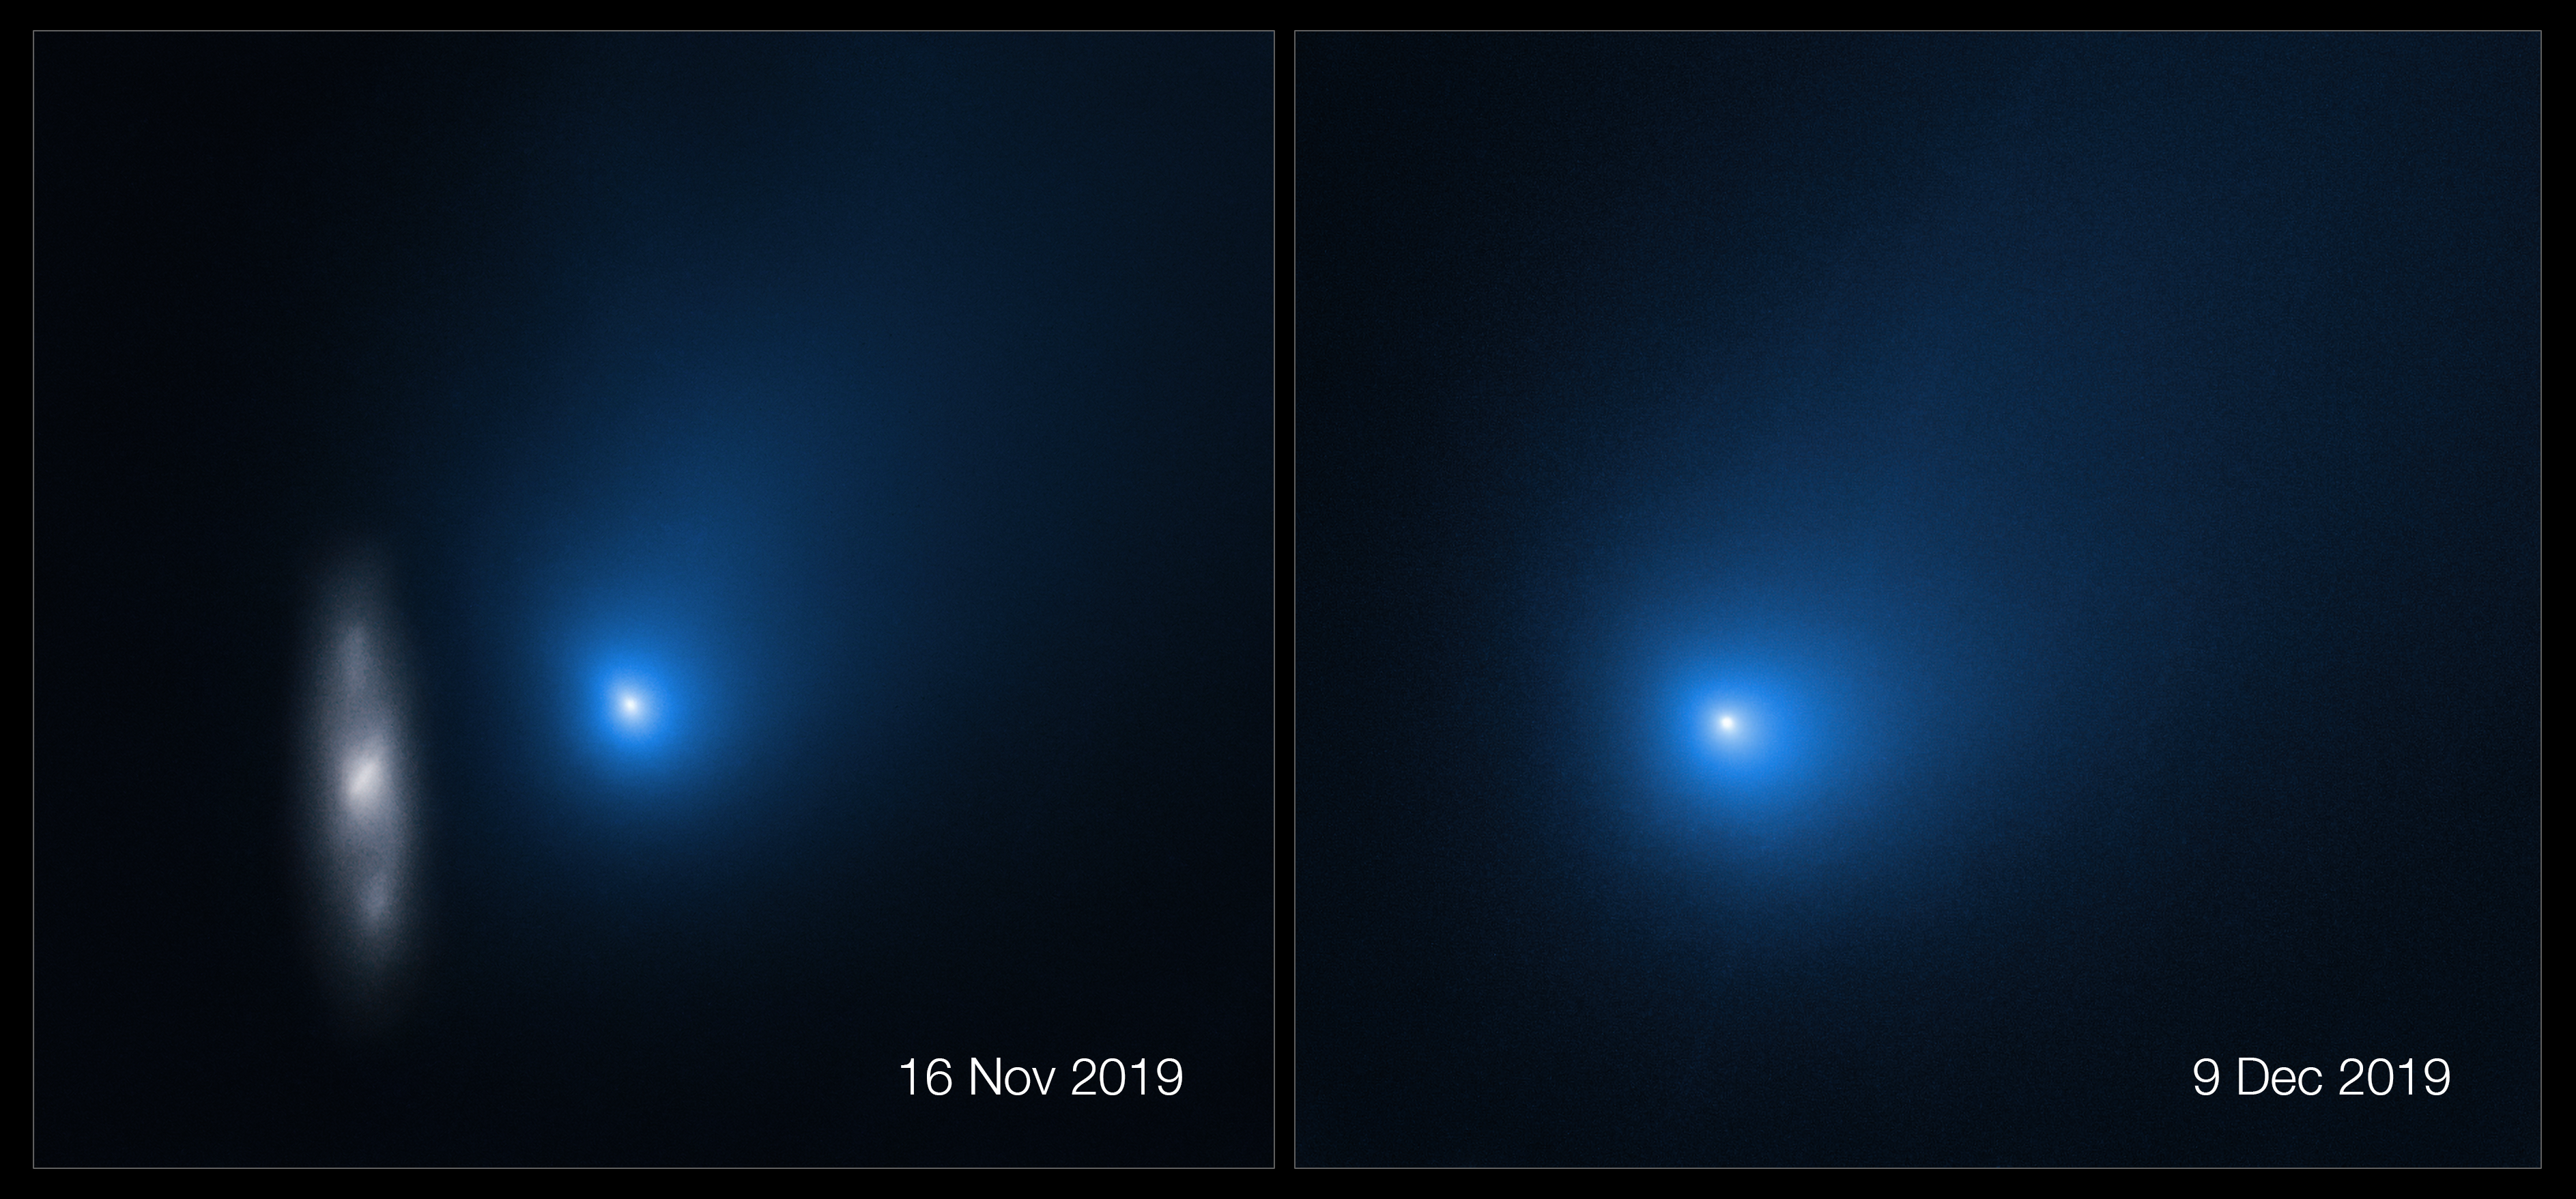

Side By Side of Hubble’s New 2I/Borisov Observations

Comet 2I/Borisov is only the second interstellar object known to have passed through our Solar System. The NASA/ESA Hubble Space Telescope has recently revisited this comet for two new observations:

Left: In this image taken by the NASA/ESA Hubble Space Telescope in November 2019, the comet appears in front of a distant background spiral galaxy. The galaxy’s bright central core is smeared in the image because Hubble was tracking the comet. Borisov was approximately 326 million kilometres from Earth in this exposure. Its tail of ejected dust streaks off to the upper right.

Right: In December 2019, Hubble revisited the comet shortly after its closest approach to the Sun. The comet is 298 million kilometres from Earth in this photo, near the inner edge of the asteroid belt. The nucleus, an agglomeration of ices and dust, is still too small to be resolved. The bright central portion is a coma made up of dust leaving the surface.

Credit: NASA, ESA, and D. Jewitt (UCLA)